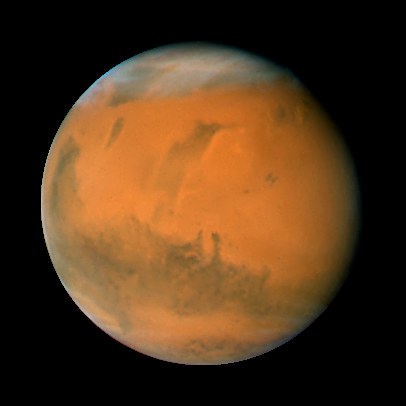

Mars on Dec. 7, 2007; longitude ~140 degrees

Mars observation taken on Dec. 7, 2007; longitude ~140 degrees

Credit: NASA, ESA, the Hubble Heritage Team (STScI/AURA), J. Bell (Cornell University), and M. Wolff (Space Science Institute, Boulder)